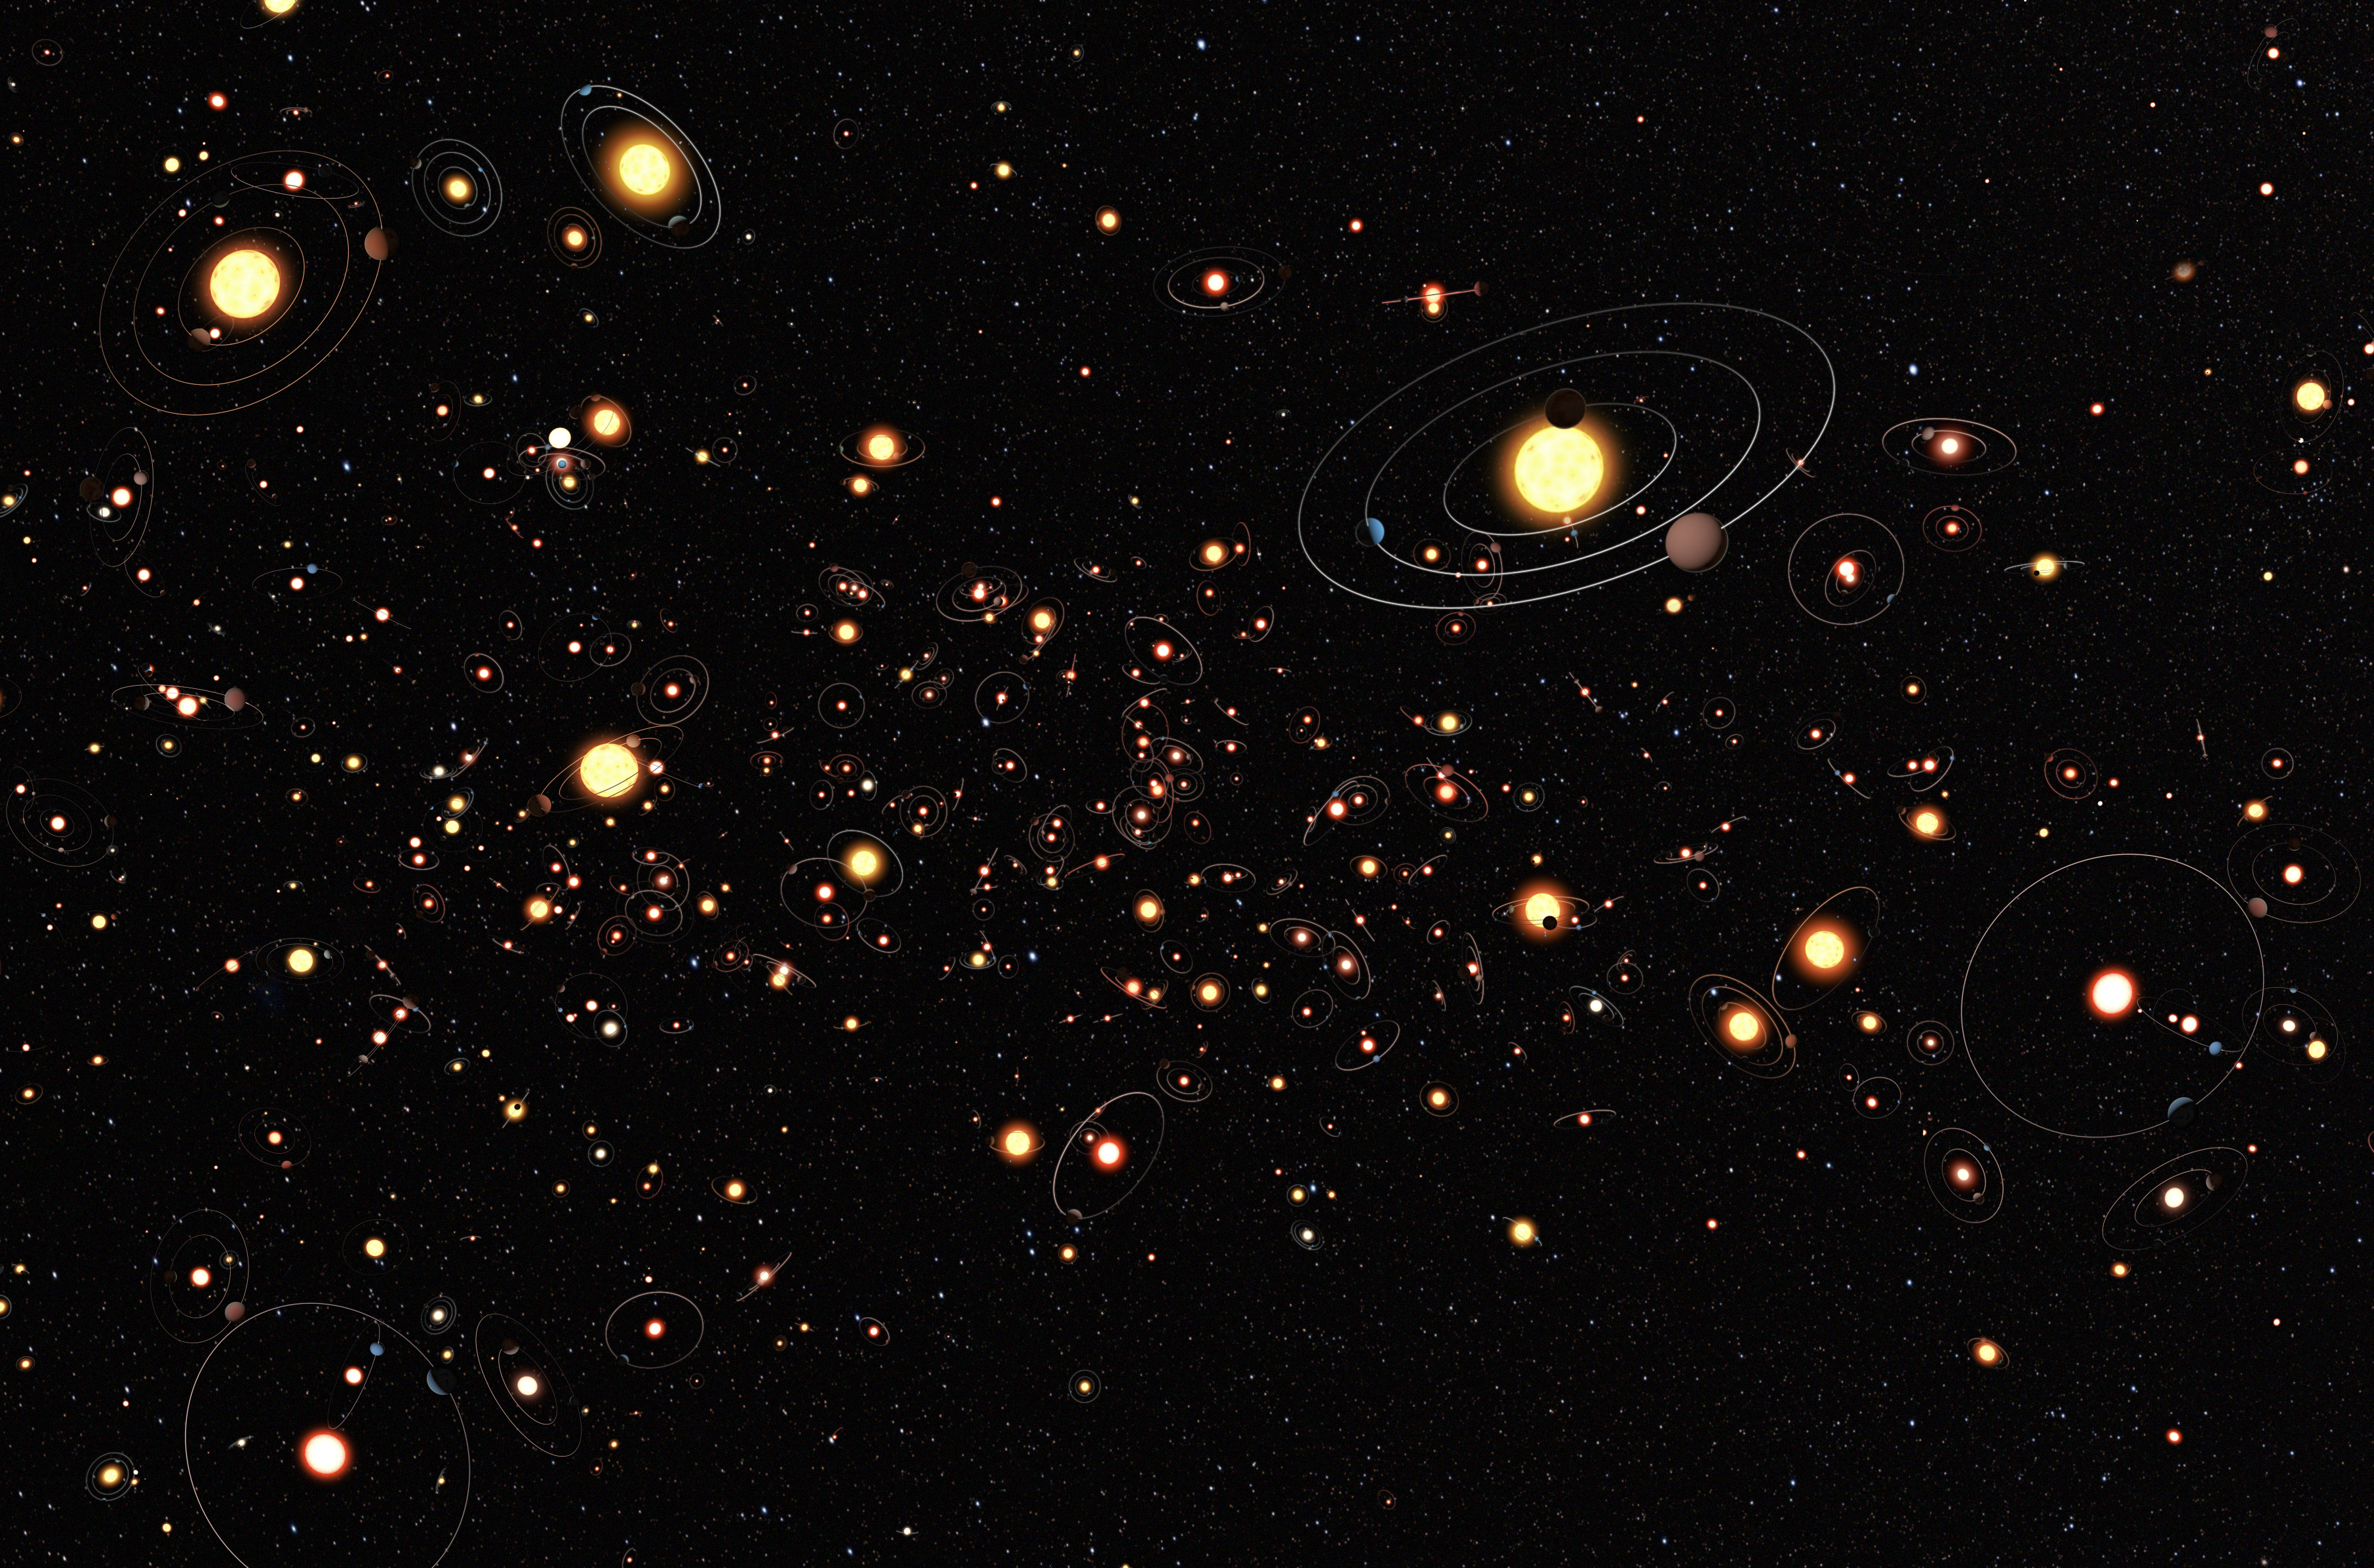

Planets everywhere

This artists’s cartoon view gives an impression of how common planets are around the stars in the Milky Way. The planets, their orbits and their host stars are all vastly magnified compared to their real separations. A six-year search that surveyed millions of stars using the microlensing technique concluded that planets around stars are the rule rather than the exception. The average number of planets per star is greater than one.

Credit: ESO/M. Kornmesser